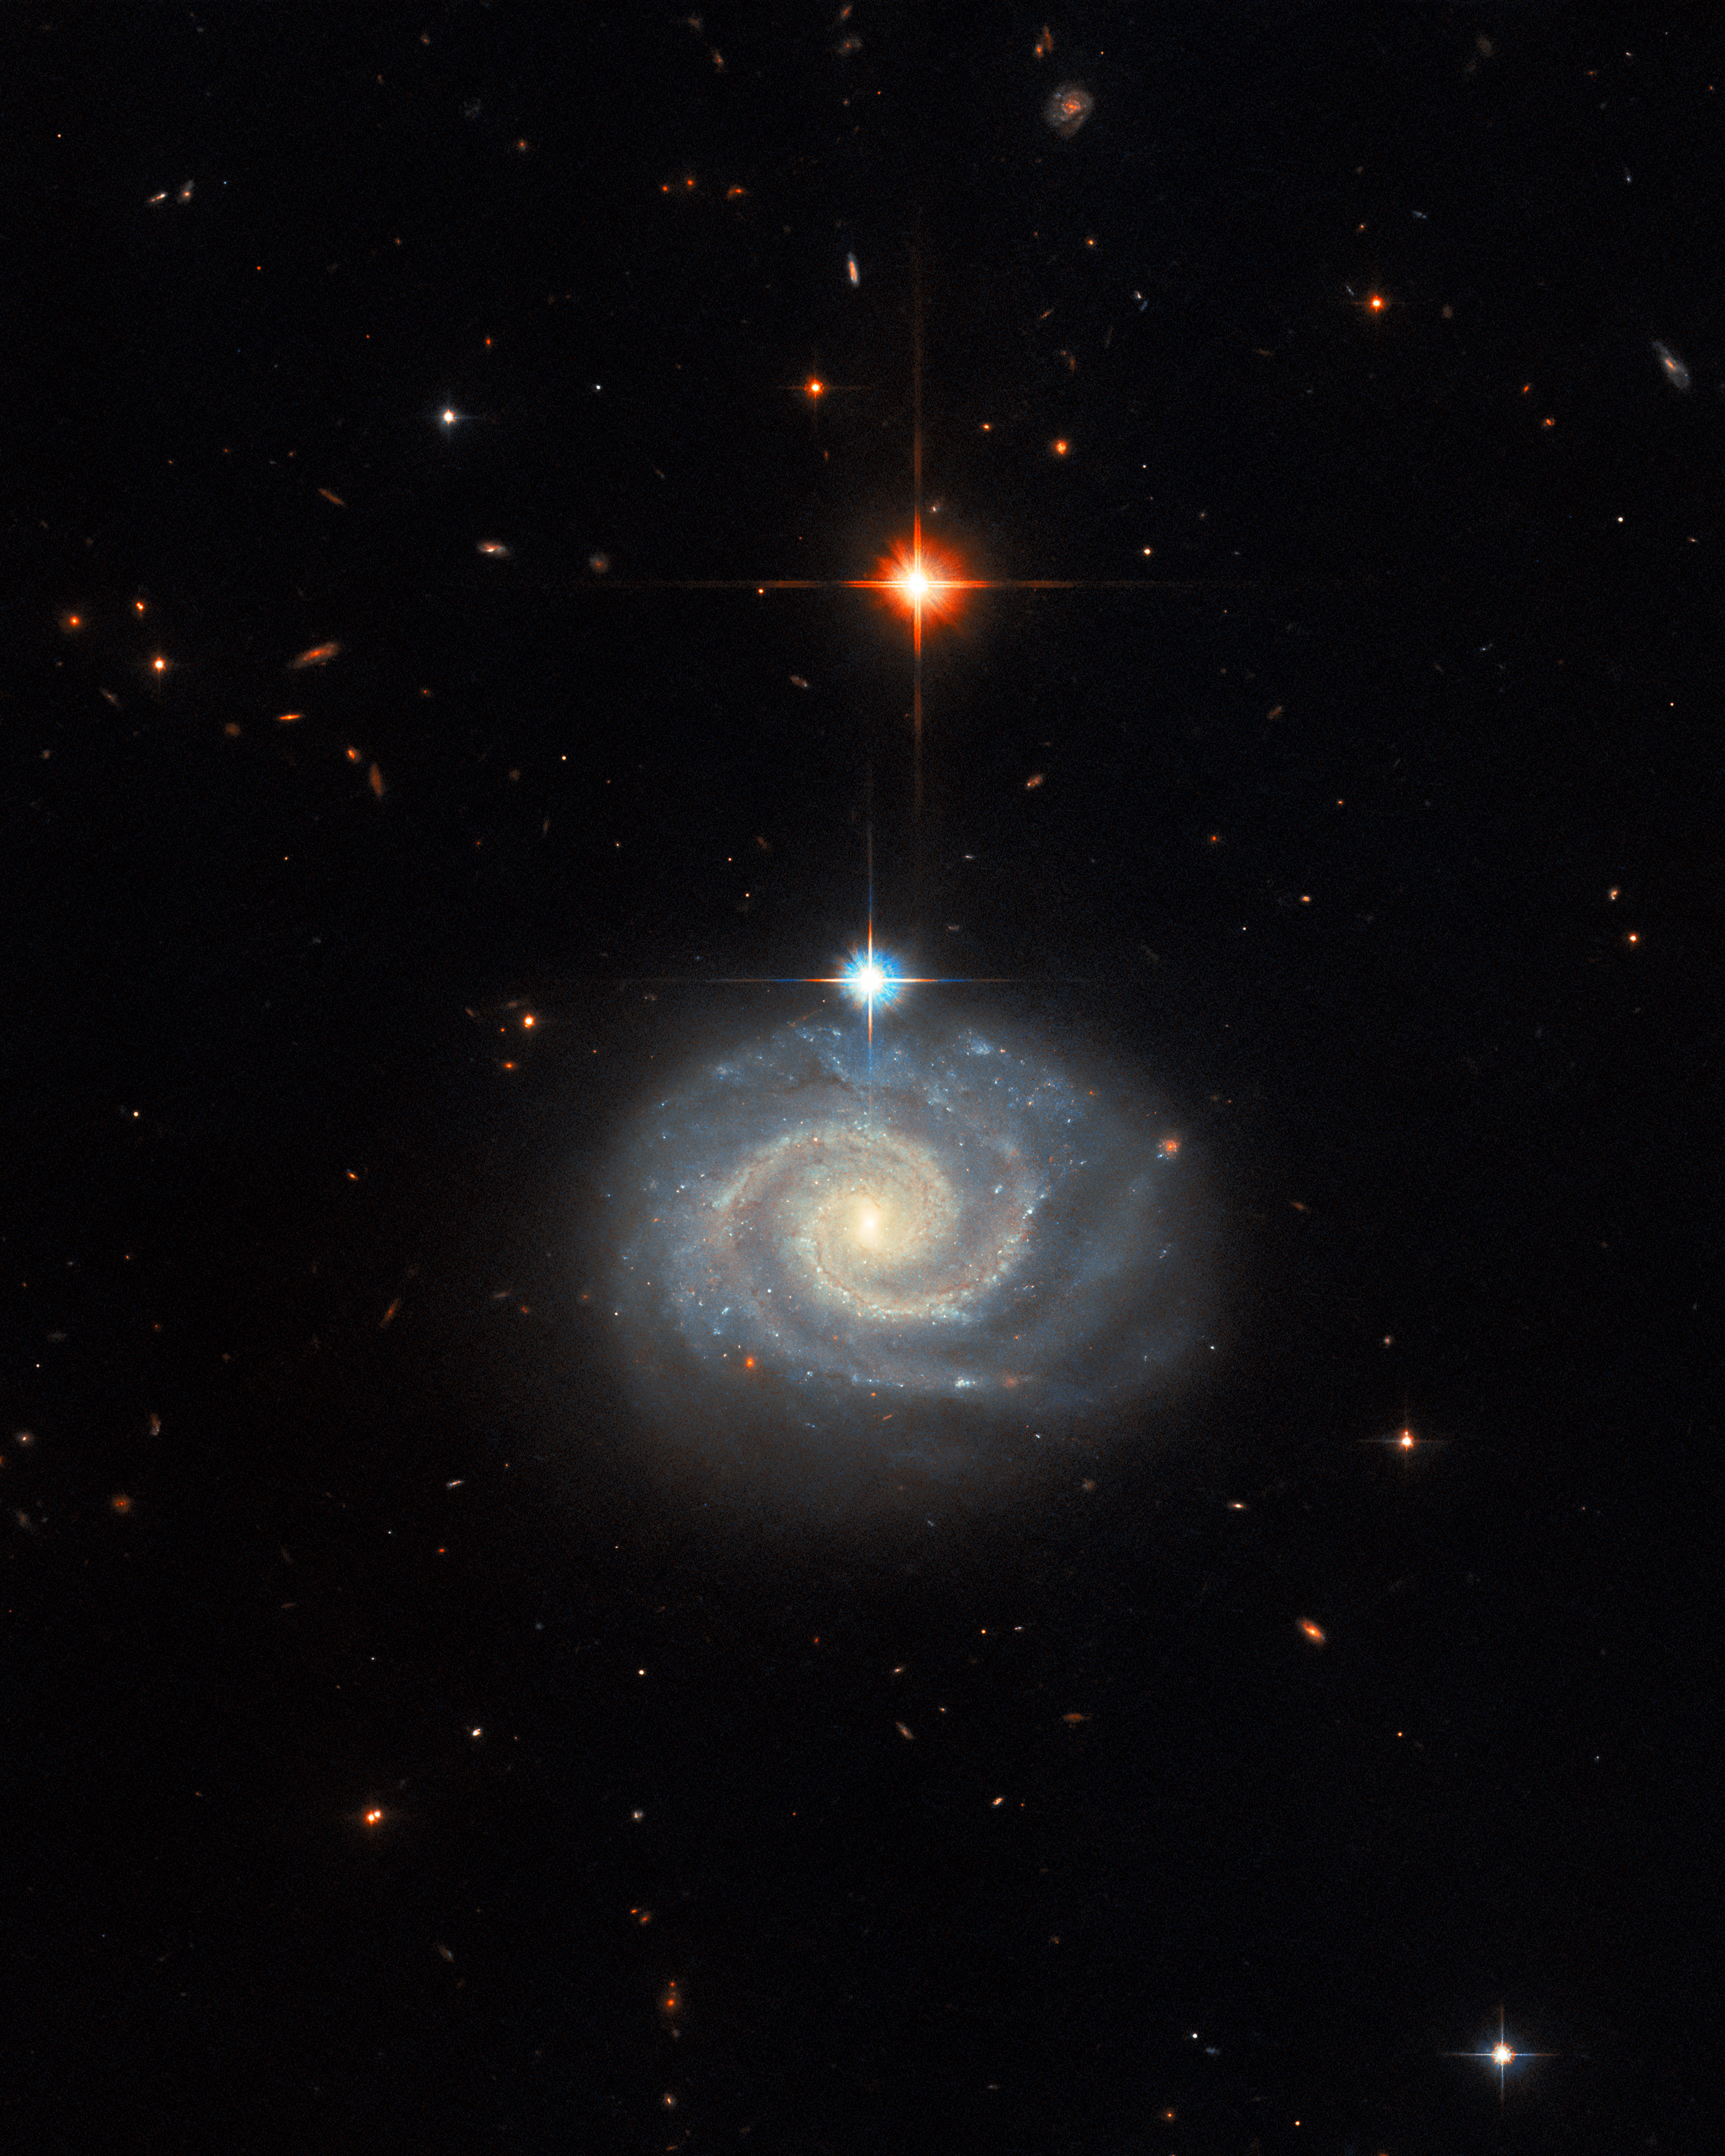

Sighting forbidden light

This whirling image features a bright spiral galaxy known as MCG-01-24-014, which is located about 275 million light-years from Earth. In addition to being a well-defined spiral galaxy, MCG-01-24-014 has an extremely energetic core, known as an active galactic nucleus (AGN), so it is referred to as an active galaxy. Even more specifically, it is categorised as a Type-2 Seyfert galaxy. Seyfert galaxies host one of the most common subclasses of AGN, alongside quasars. Whilst the precise categorisation of AGNs is nuanced, Seyfert galaxies tend to be relatively nearby ones where the host galaxy remains plainly detectable alongside its central AGN, while quasars are invariably very distant AGNs whose incredible luminosities outshine their host galaxies.

There are further subclasses of both Seyfert galaxies and quasars. In the case of Seyfert galaxies, the predominant subcategories are Type-1 and Type-2. These are differentiated from one another by their spectra — the pattern that results when light is split into its constituent wavelengths — where the spectral lines that Type-2 Seyfert galaxies emit are particularly associated with specific so-called ‘forbidden’ emission. To understand why emitted light from a galaxy could be considered forbidden, it helps to understand why spectra exist in the first place. Spectra look the way they do because certain atoms and molecules will absorb and emit light very reliably at very specific wavelengths. The reason for this is quantum physics: electrons (the tiny particles that orbit the nuclei of atoms and molecules) can only exist at very specific energies, and therefore electrons can only lose or gain very specific amounts of energy. These very specific amounts of energy correspond to certain light wavelengths being absorbed or emitted.

Forbidden emission lines, therefore, are spectral emission lines that should not exist according to certain rules of quantum physics. But quantum physics is complex, and some of the rules used to predict it use assumptions that suit laboratory conditions here on Earth. Under those rules, this emission is ‘forbidden’ — so improbable that it’s disregarded. But in space, in the midst of an incredibly energetic galactic core, those assumptions don’t hold anymore, and the ‘forbidden’ light gets a chance to shine out towards us.

Credit: ESA/Hubble & NASA, C. Kilpatrick